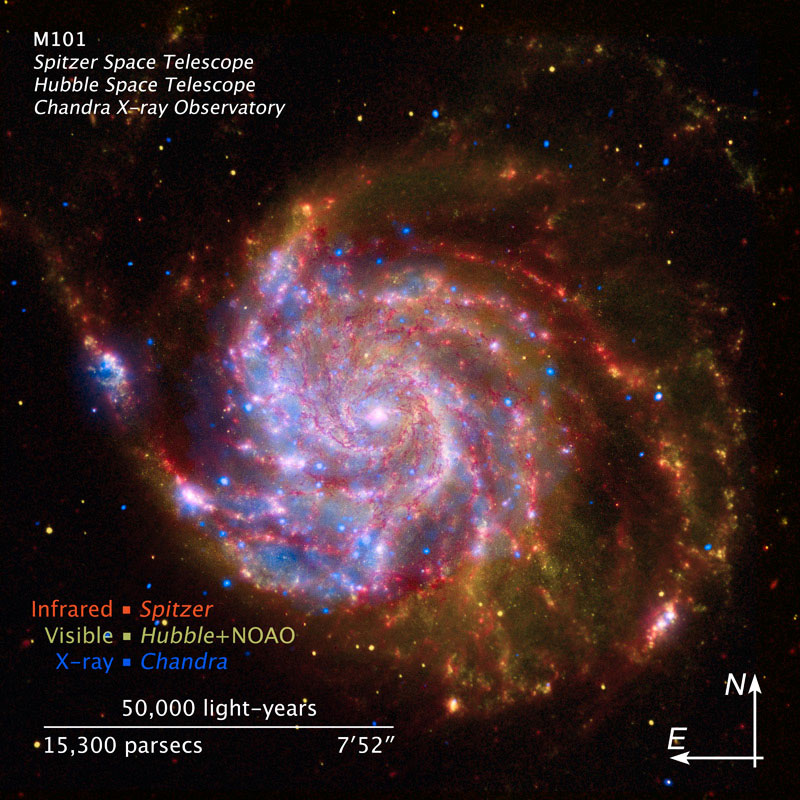

Compass and scale illustration for M101

This composit picture of the spiral galaxy M 101 uses data received from the three most advanced space telescopes and the National Optical Astronomy Observatory (NOAO)

Red colors indicate emissions in the infrared observed by the Spityer Space Telescope and show the distribution of dust and gas in the galaxy along the spiral arms. Blue colors show X-ray sources observed with the Chandra X-Ray Observatory. These areas are hot and high energetic due to exploded stars, superheated gas and material falling toward black holes. Brown-beige colors finally shows the part of the galaxy which would also be visible for the human eye and composes of pictures taken by Hubble and the NOAO.

M 101, located more than 21 million light years from Earth in the constellation Ursa Majro, is a relatively large spiral galaxy compared to the Milky Way. It is noted for its high population of H II regions and its strong star fomation activity. In 2011 a Supernova was discovered. This was the fourth observed supernova in M 101 since 1907.

Credit: NASA, ESA and Z. Levay (STScI)